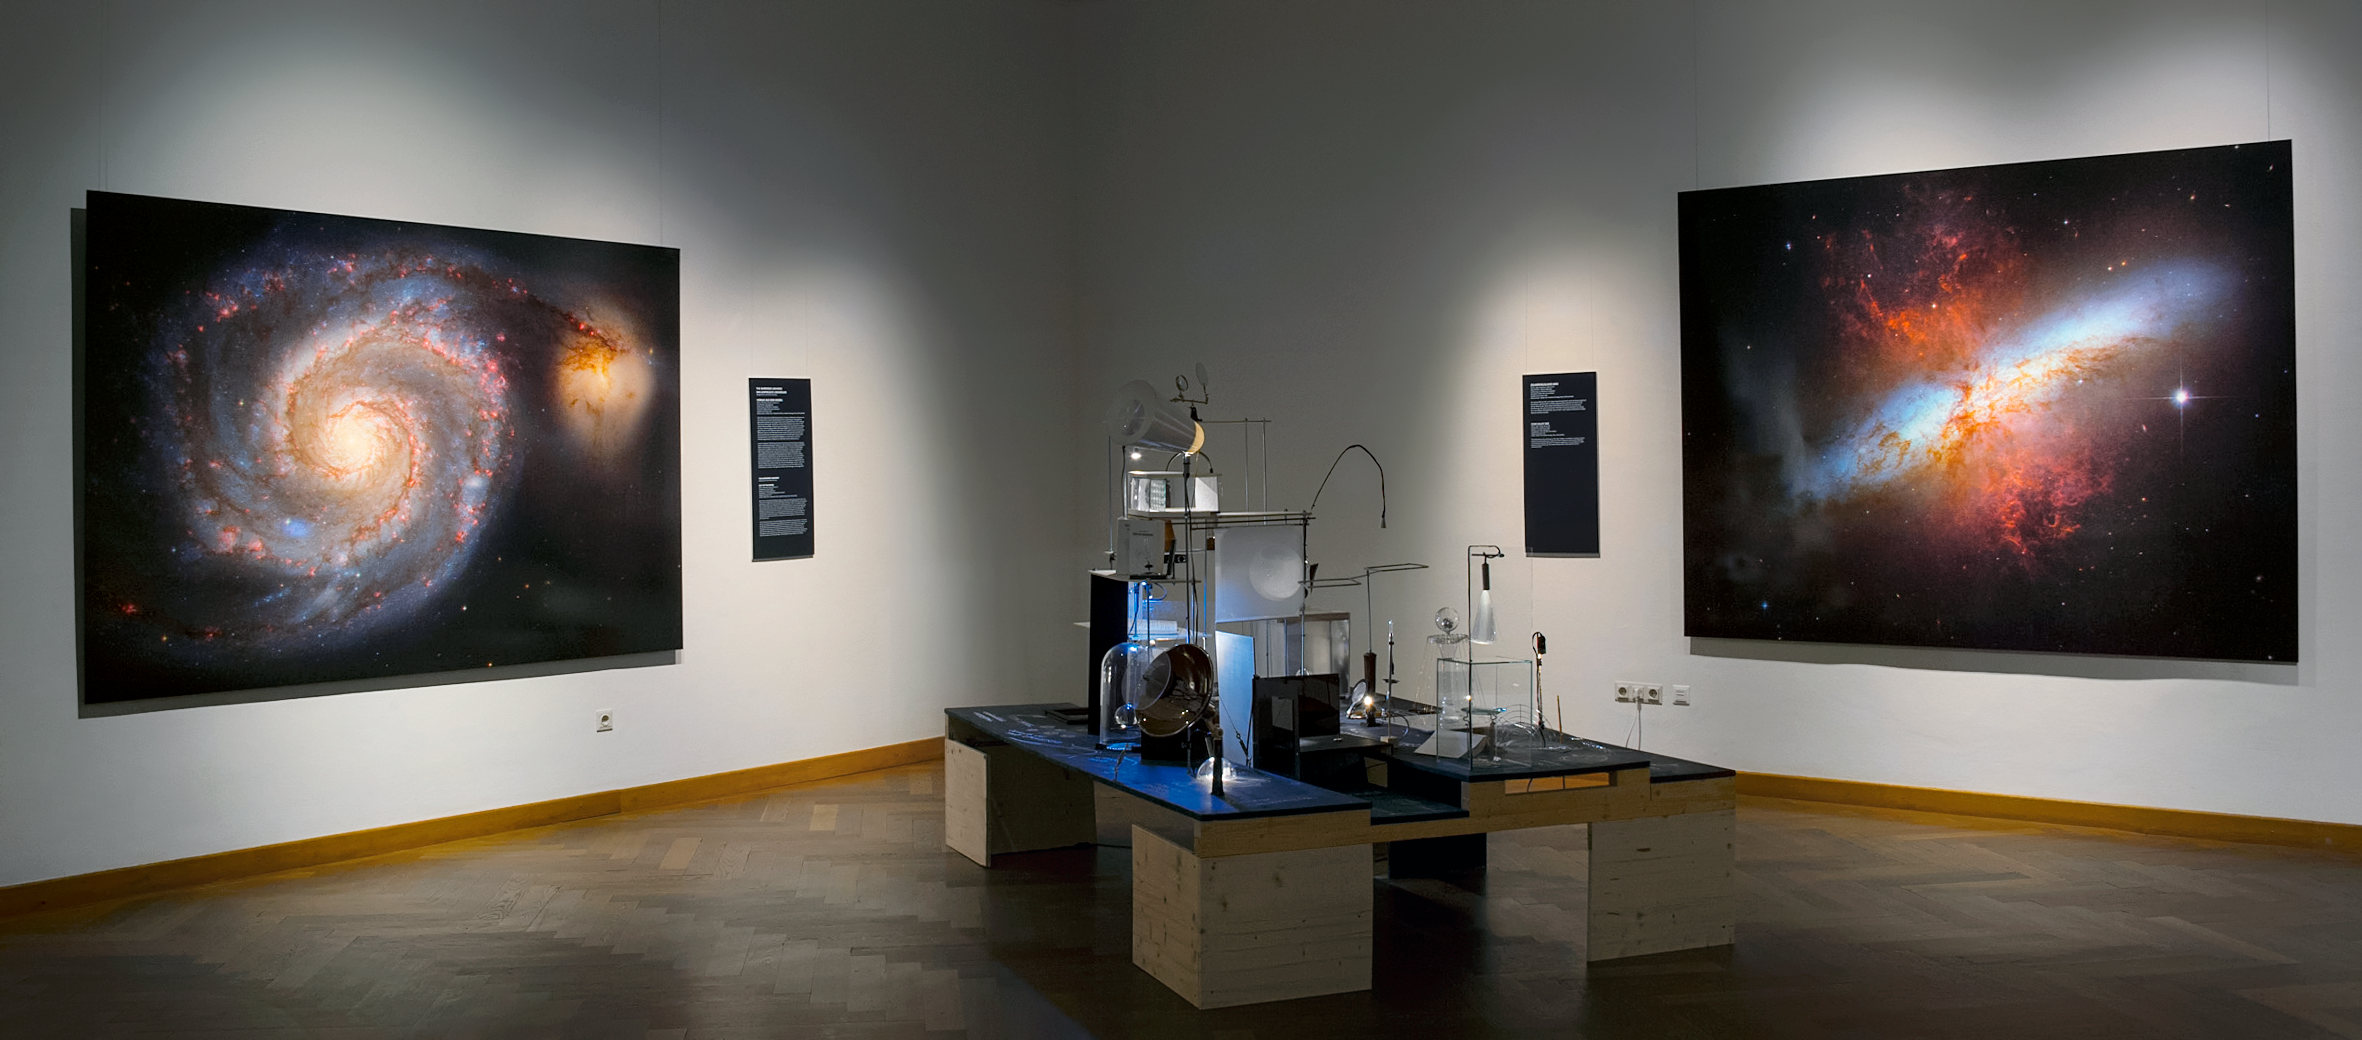

Our Place in Space — The Mirrored Universe

In the installation The Mirrored Universe artists Margit Busch and Solmaz Farhang construct a scenario in which a person has disappeared in a completely inexplicable way. Only a mysterious room, a small strange laboratory filled with strange equipment, was left behind. The only indication of what could have happened are measurements of unusual disturbances of electromagnetic waves in the centre of Vienna. The installation invites visitors to engage in the fictional story of this person, who apparently worked on nothing less than a reconstruction of the Universe: The investigators have recovered some of the instruments in the abandoned laboratory and are now trying to make sense of what they found. The results of these speculations are on display.

The installation was created for the Hubble travelling exhibition Our Place in Space in Vienna.

Credit: NHM Wien, Kurt Kracher